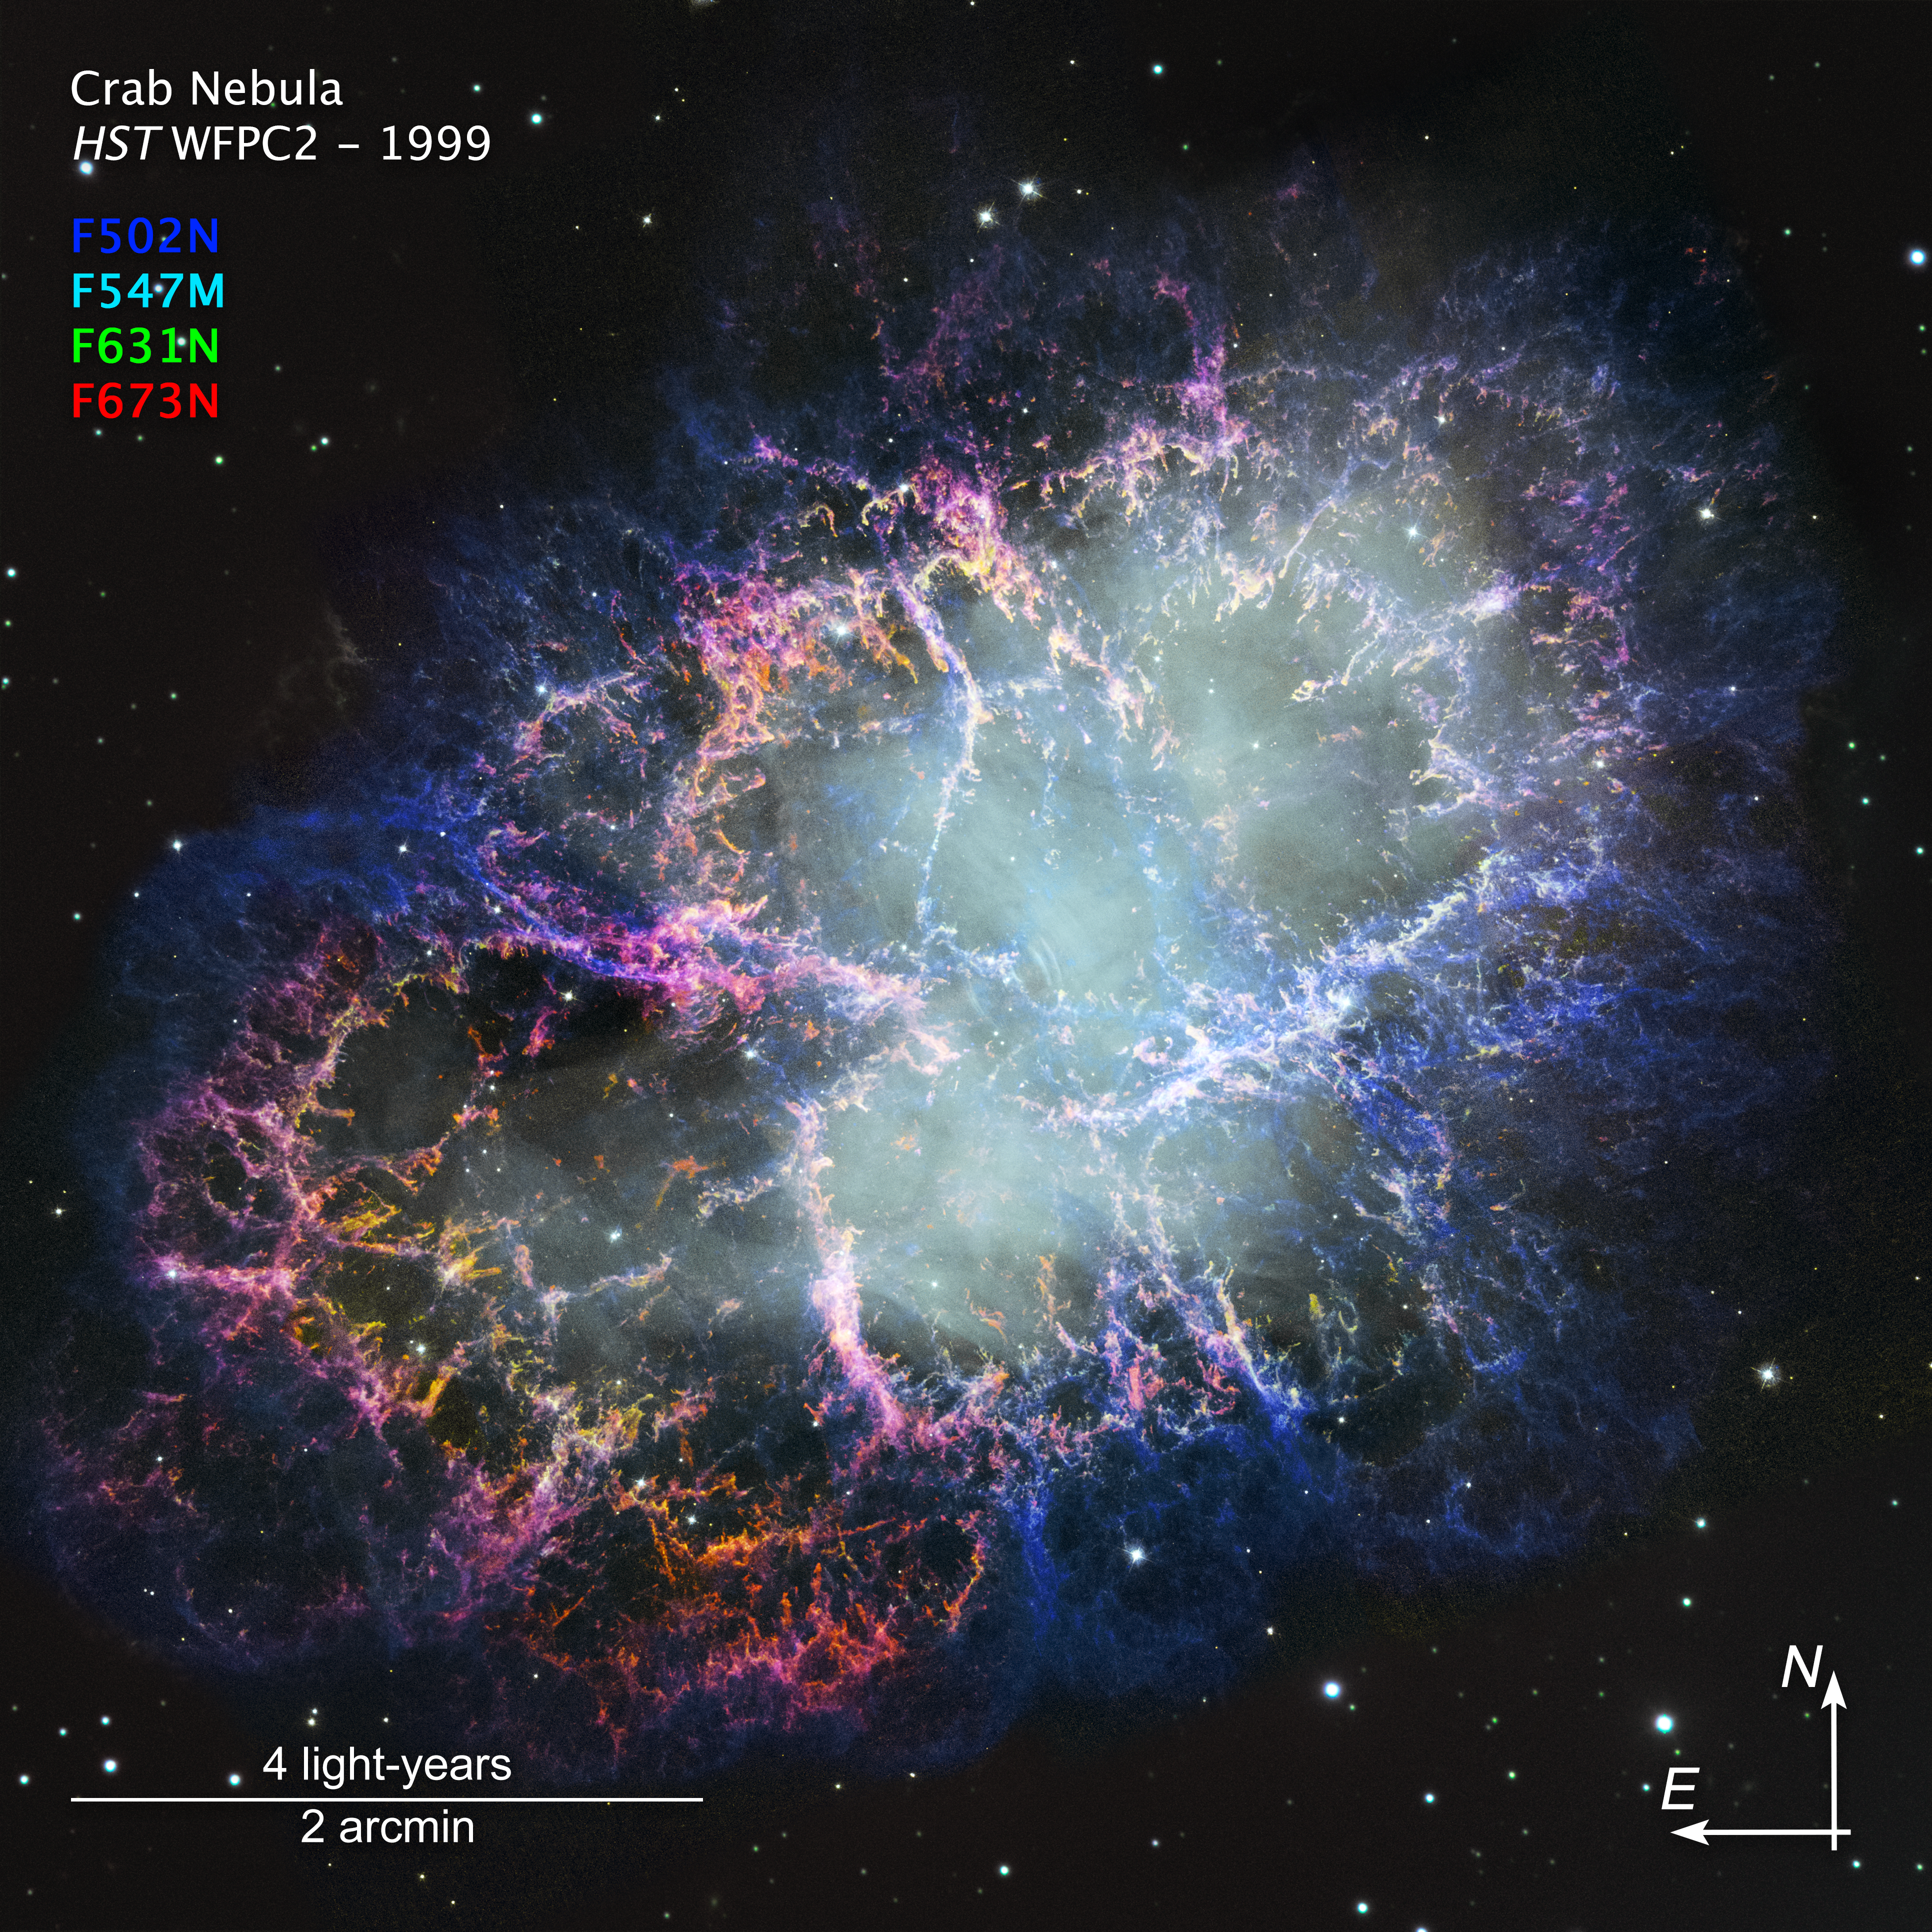

Crab Nebula (new image from 1999/2000 data, annotated)

This newly processed image comes from data originally captured by the NASA/ESA Hubble Space Telescope in 1999 and 2000. Updated image-processing technology allows for this archival image to be best compared with more recent data, including those captured by Hubble itself. Hubble received a new imaging instrument in 2009, the Wide Field Camera 3.

Credit: NASA, ESA, STScI, W. Blair (JHU). Image Processing: J. DePasquale (STScI)